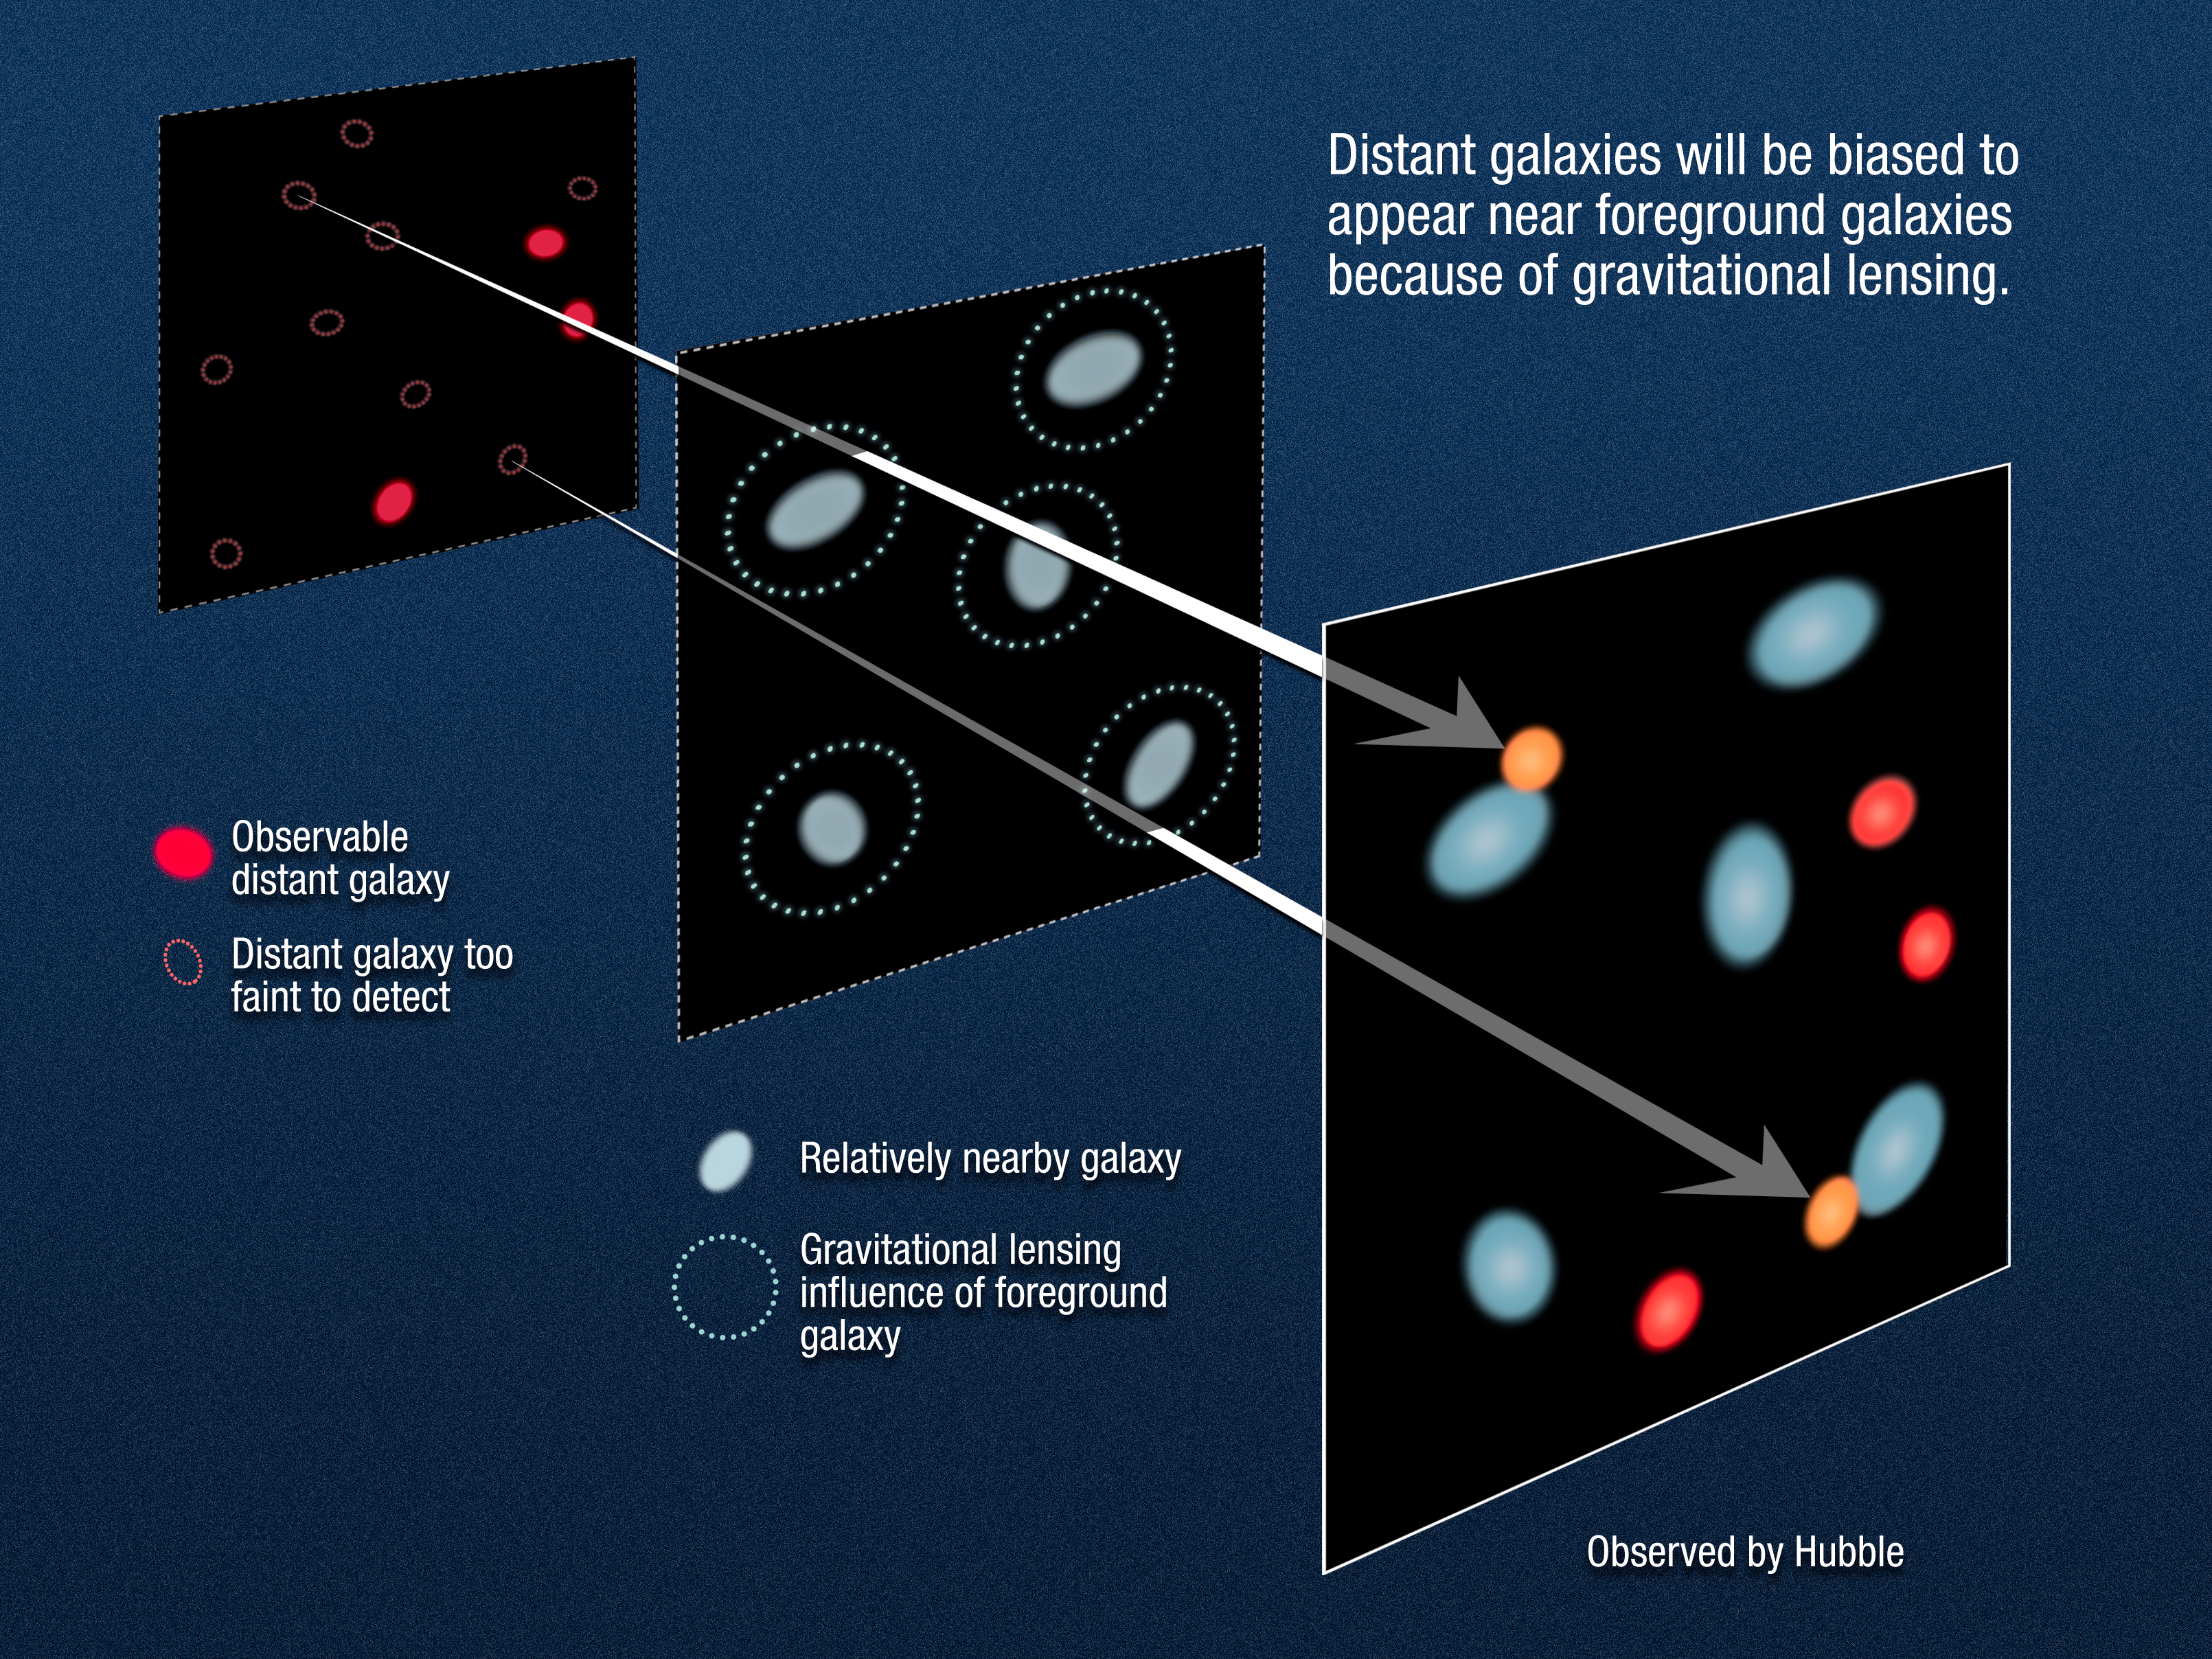

Gravitational lensing of distant galaxies

This diagram illustrates how gravitational lensing by foreground galaxies will influence the appearance of far more distant background galaxies. This means that as many as 20 percent of the most distant galaxies currently detected will appear brighter because their light is being amplified by the effects of foreground intense gravitational fields.

The plane at far left contains background high-redshift galaxies. The middle plane contains foreground galaxies; their gravity amplifies the brightness of the background galaxies. The right plane shows how the field would look from Earth with the effects of gravitational lensing added. Distant galaxies that might otherwise be invisible appear due to lensing effects.

Credit: NASA, ESA and A. Feild (STScI)
Science Credit: NASA, ESA, S. Wyithe (University of Melbourne, Australia), H. Yan (Ohio State University, USA), R. Windhorst (Arizona State University, USA), and S. Mao (Jodrell Bank Centre for Astrophysics, and National Astronomical Observatories of China)